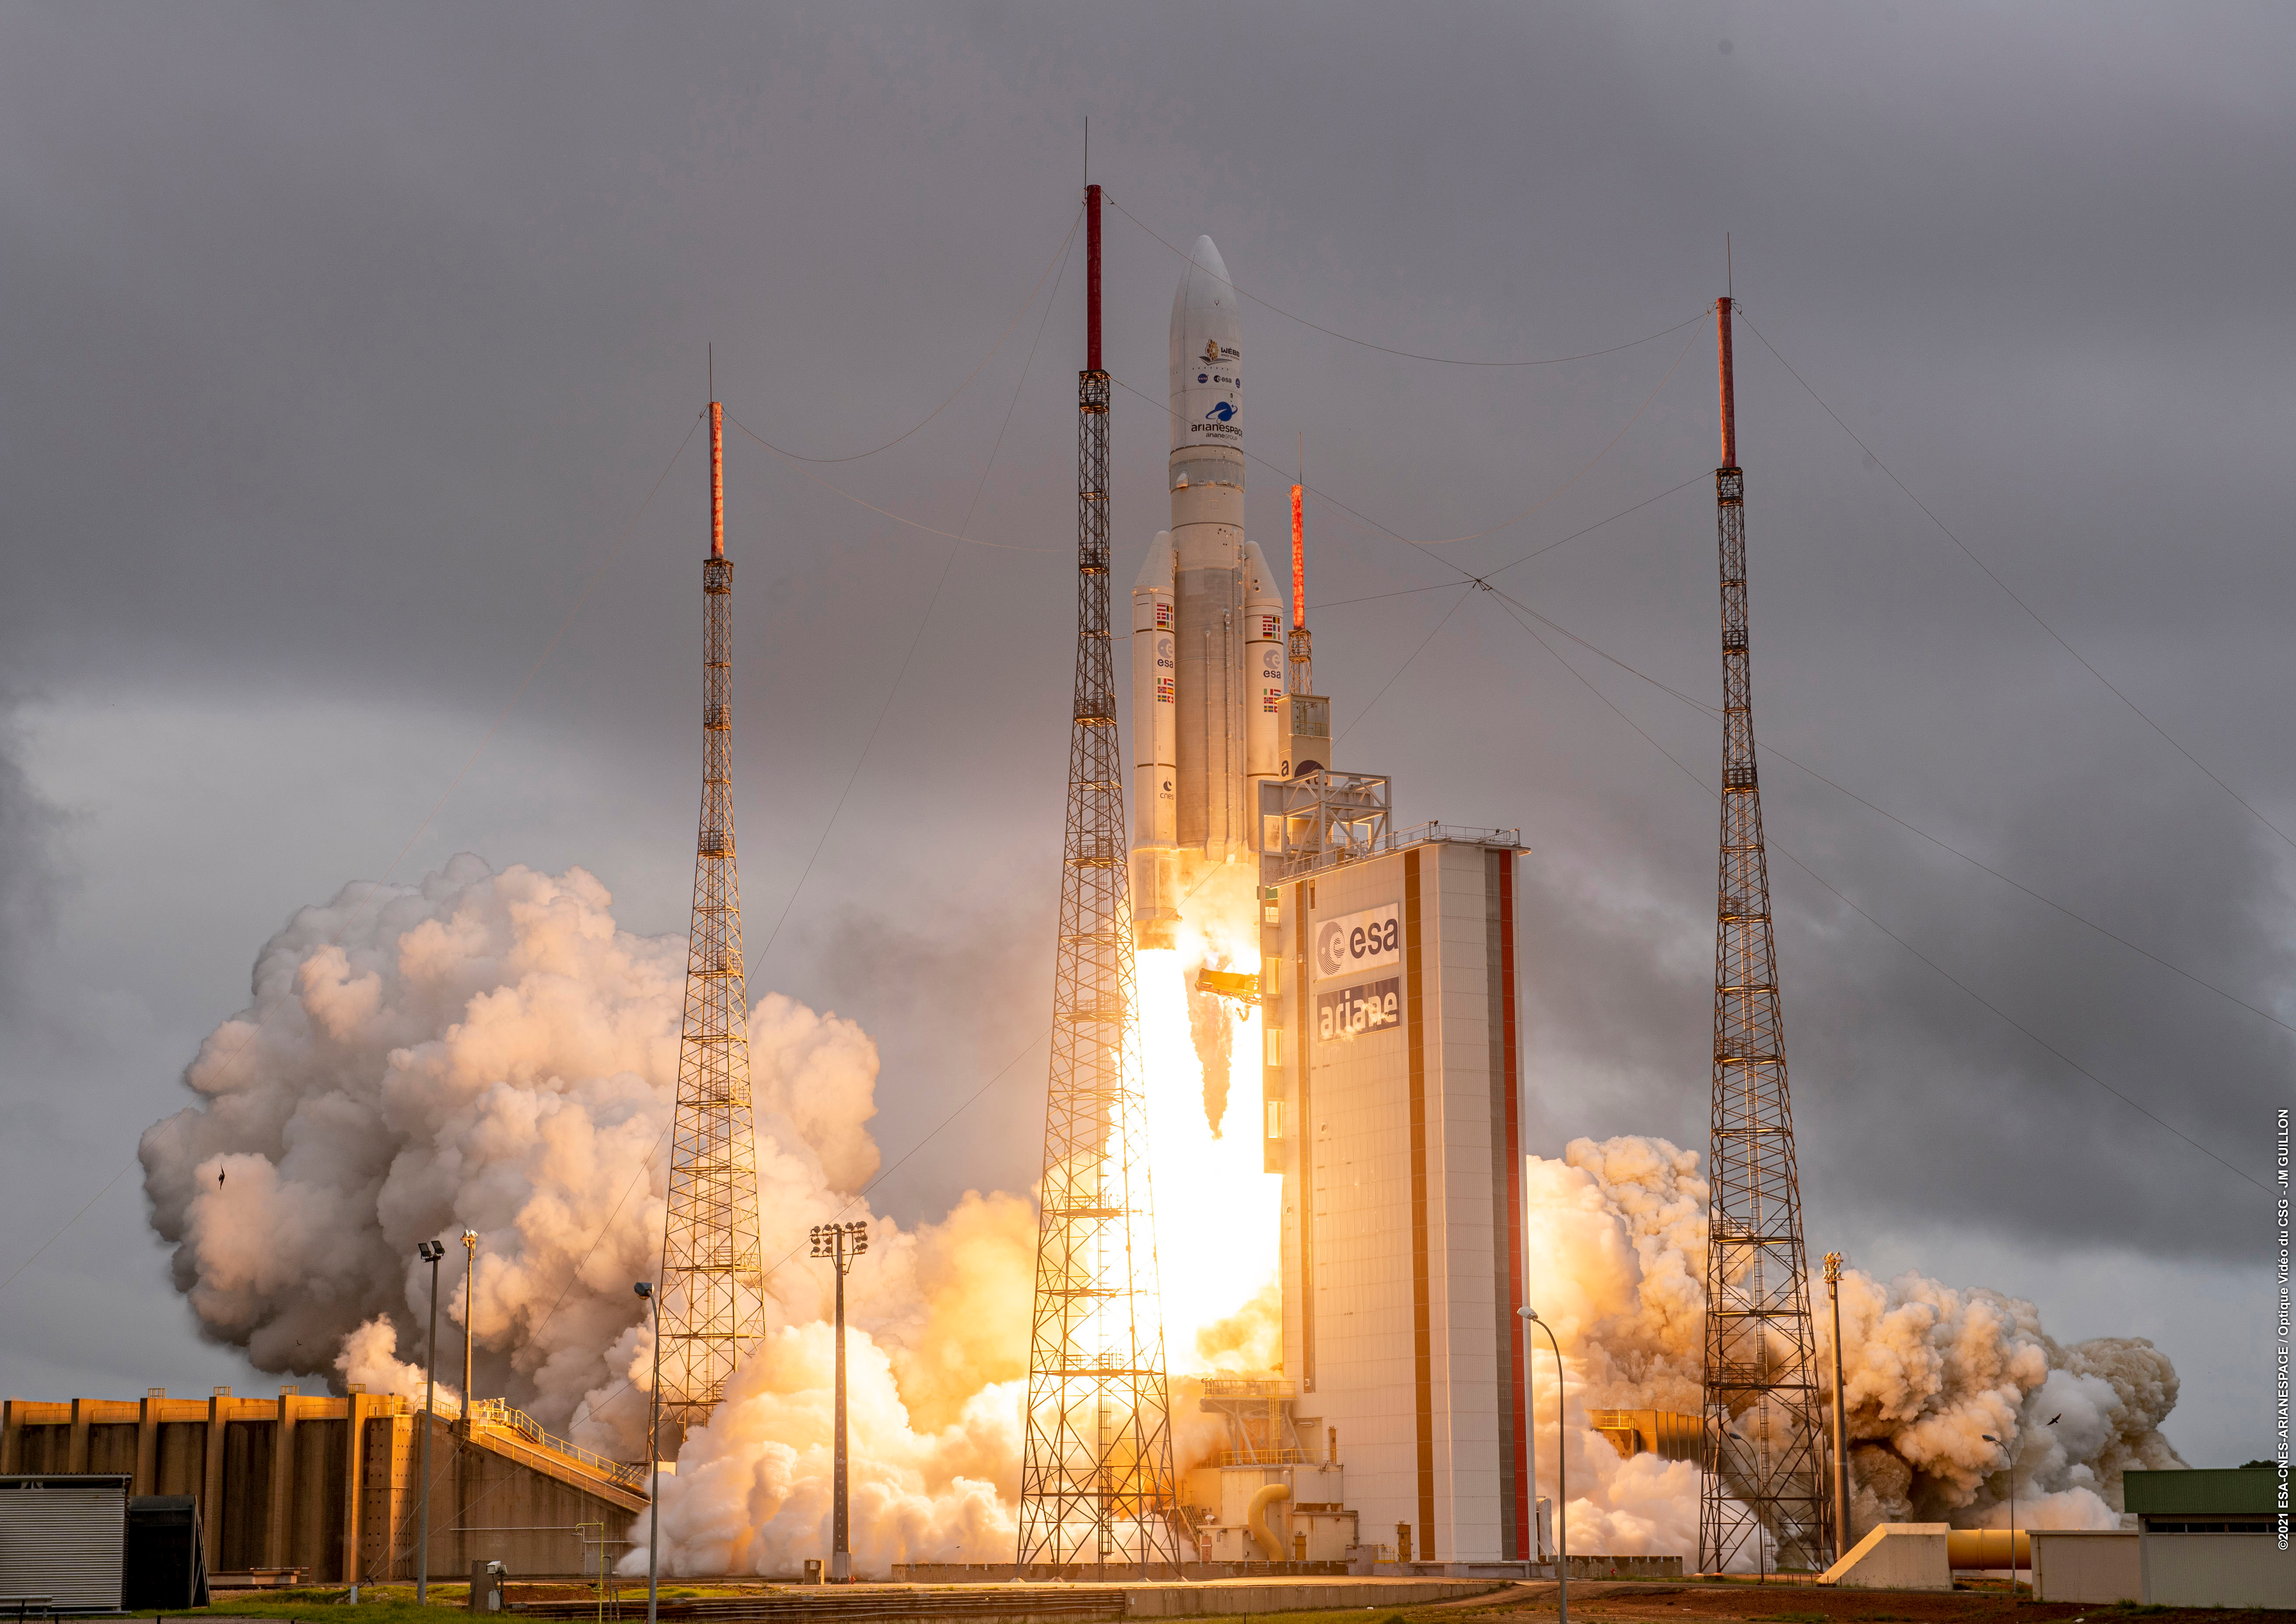

Webb Liftoff on Ariane 5

The James Webb Space Telescope lifted off on an Ariane 5 rocket from Europe’s Spaceport in French Guiana, at 13:20 CET on 25 December on its exciting mission to unlock the secrets of the Universe.

Credit: ESA/CNES/Arianespace